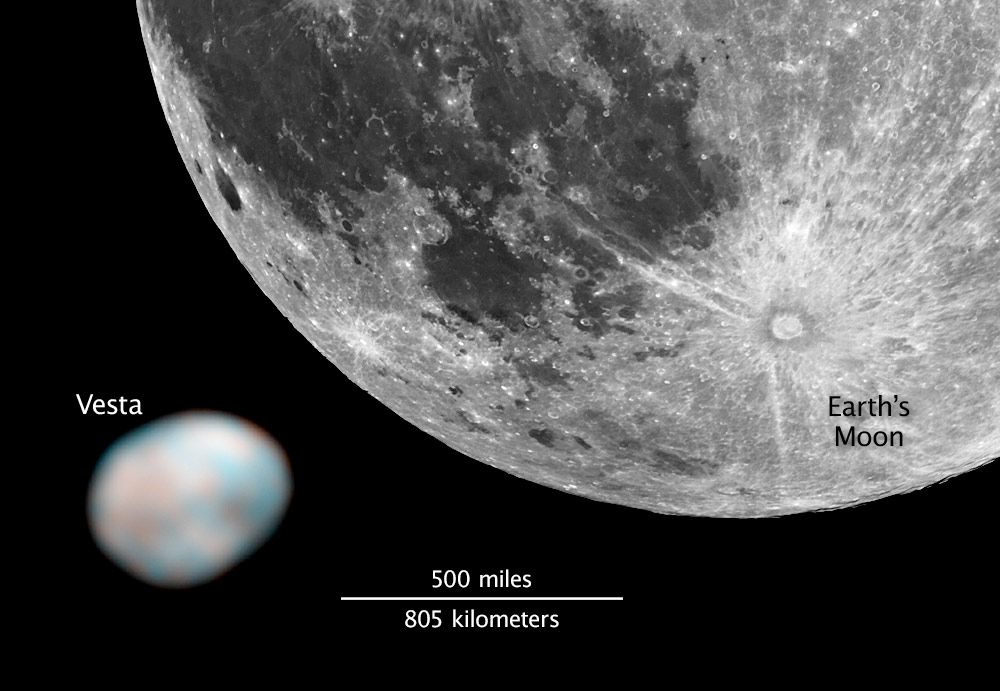

Moon/Vesta size comparison

Moon/Vesta size comparison

Credit: NASA, ESA, and Z. Levay (STScI). Vesta Image Credit: NASA, ESA, J.-Y. Li (University of Maryland, College Park), and L. McFadden (NASA/GSFC). Moon Image Credit: T. Rector, I. Dell'Antonio/NOAO/AURA/NSF